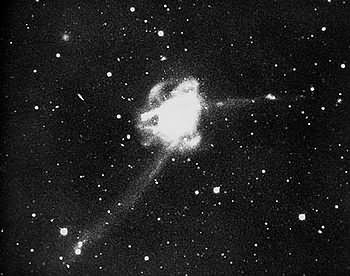

NGC 7252

NGC 7252 is the resulting objects of two galaxies colliding with each others a billion years ago. Because of its loop-like sturcutres, made of stars and dust, that resemble a diagram of an electron orbiting an atomic nucleus, NGC 7252 also bears the nickname Atoms-for-Peace.

This galactic pile-up provides astronomers an excellent opportunity to study how mergers between galaxies affect the evolution of the Universe. In studying similar objects we can already predict that in a few billion years NGC 7252 will have completed its merging process and will have finished its transformation in an elliptical galaxy.

The Milky way will probably undergo a similar evolution as NGC 7252 after its collision with the Andromeda galaxy in the far future.

Credit: Francois Schweizer (CIW/DTM)